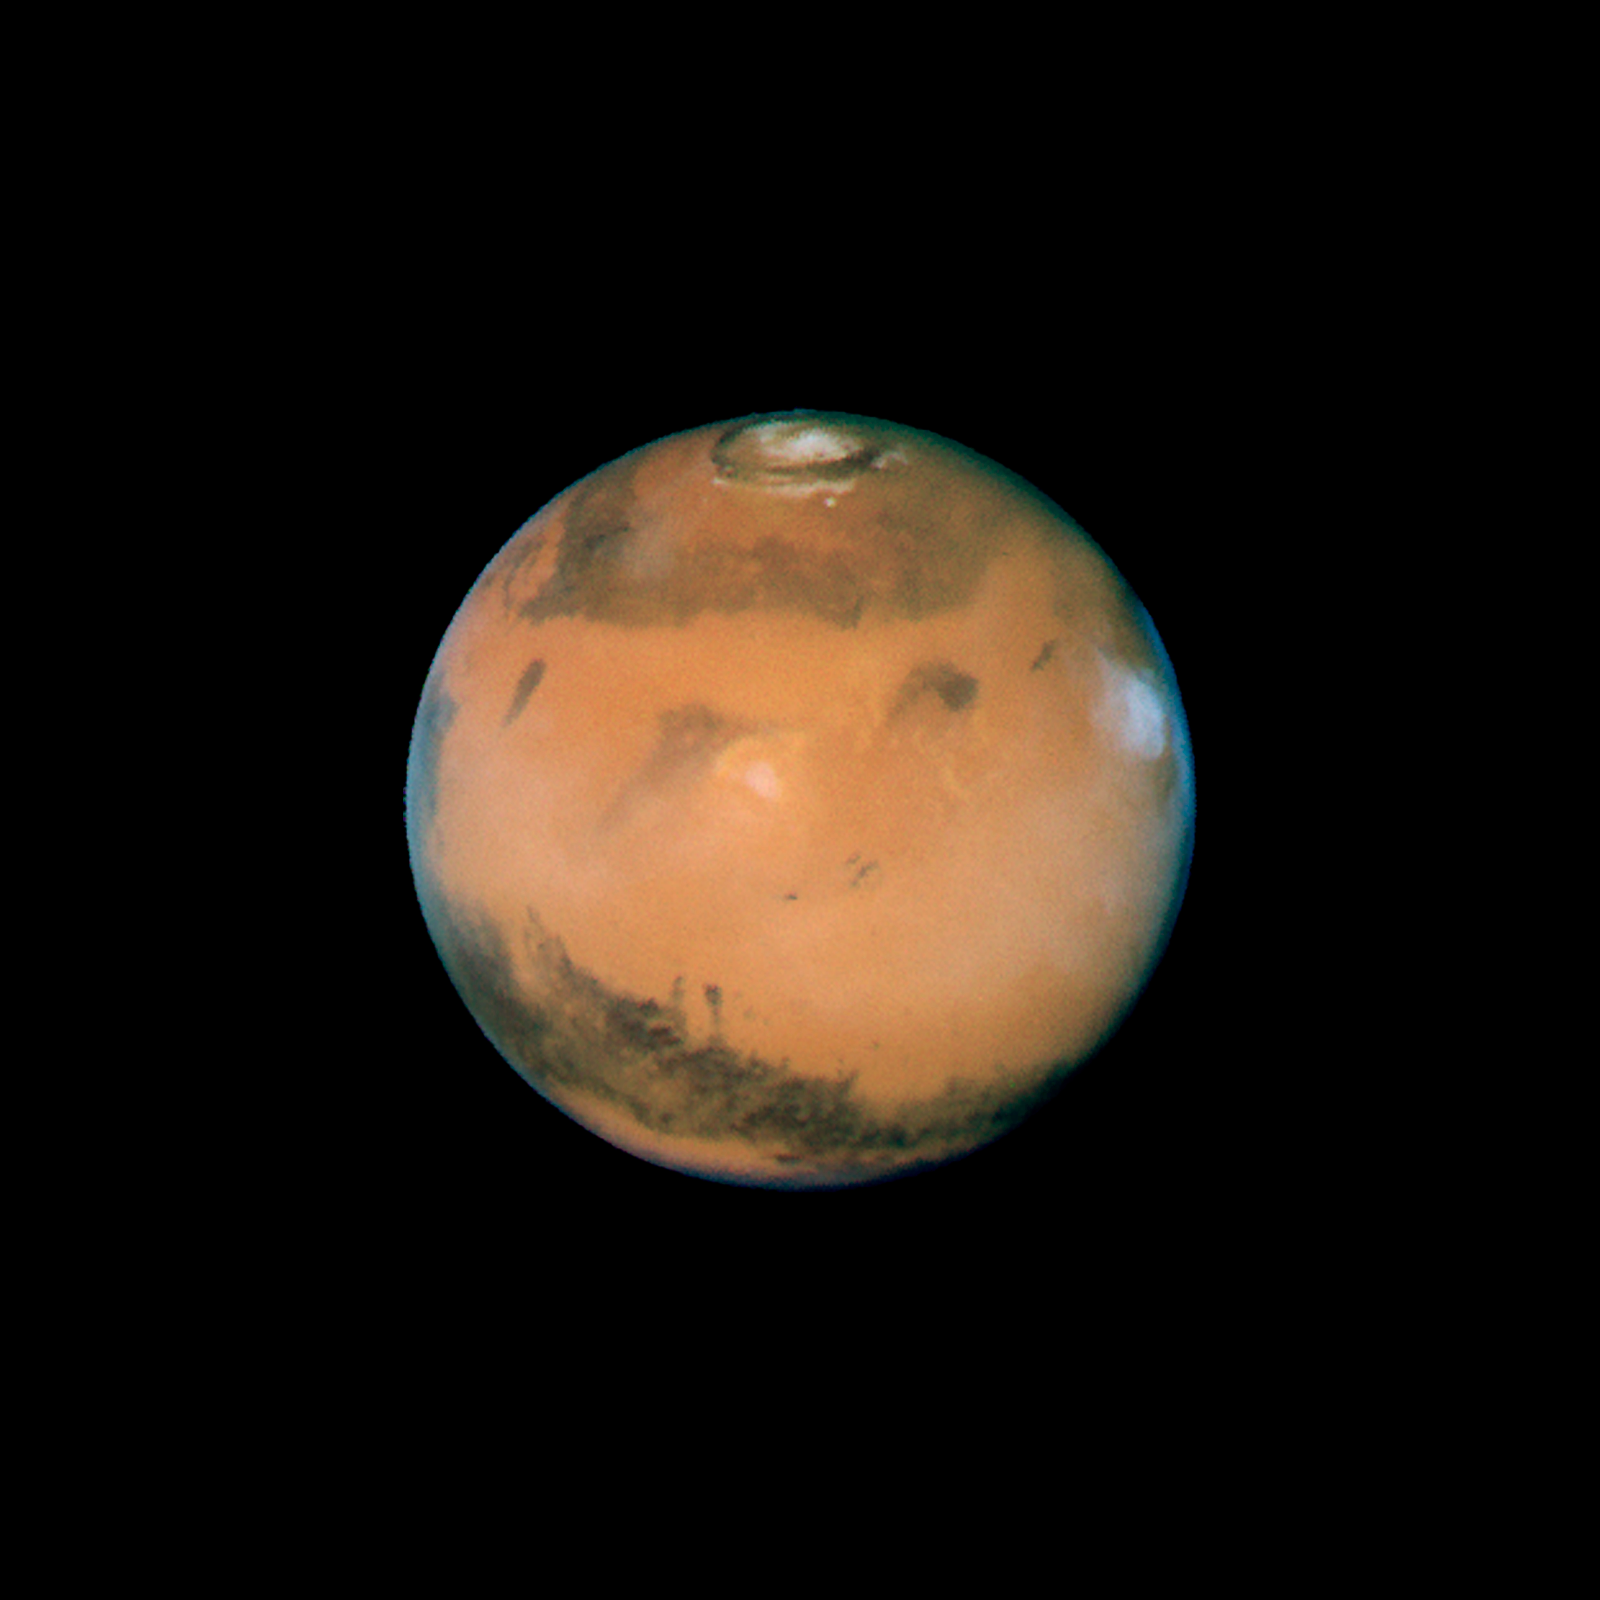

Mars near opposition 1995-2005: 1997

NASA's Hubble Space Telescope snapped this picture of Mars on October 28, within a day of its closest approach to Earth on the night of October 29. The large regional dust storm appears as the brighter, redder cloudy region in the middle of the planet's disk.

Credit: NASA, ESA, and The Hubble Heritage Team (STScI/AURA)